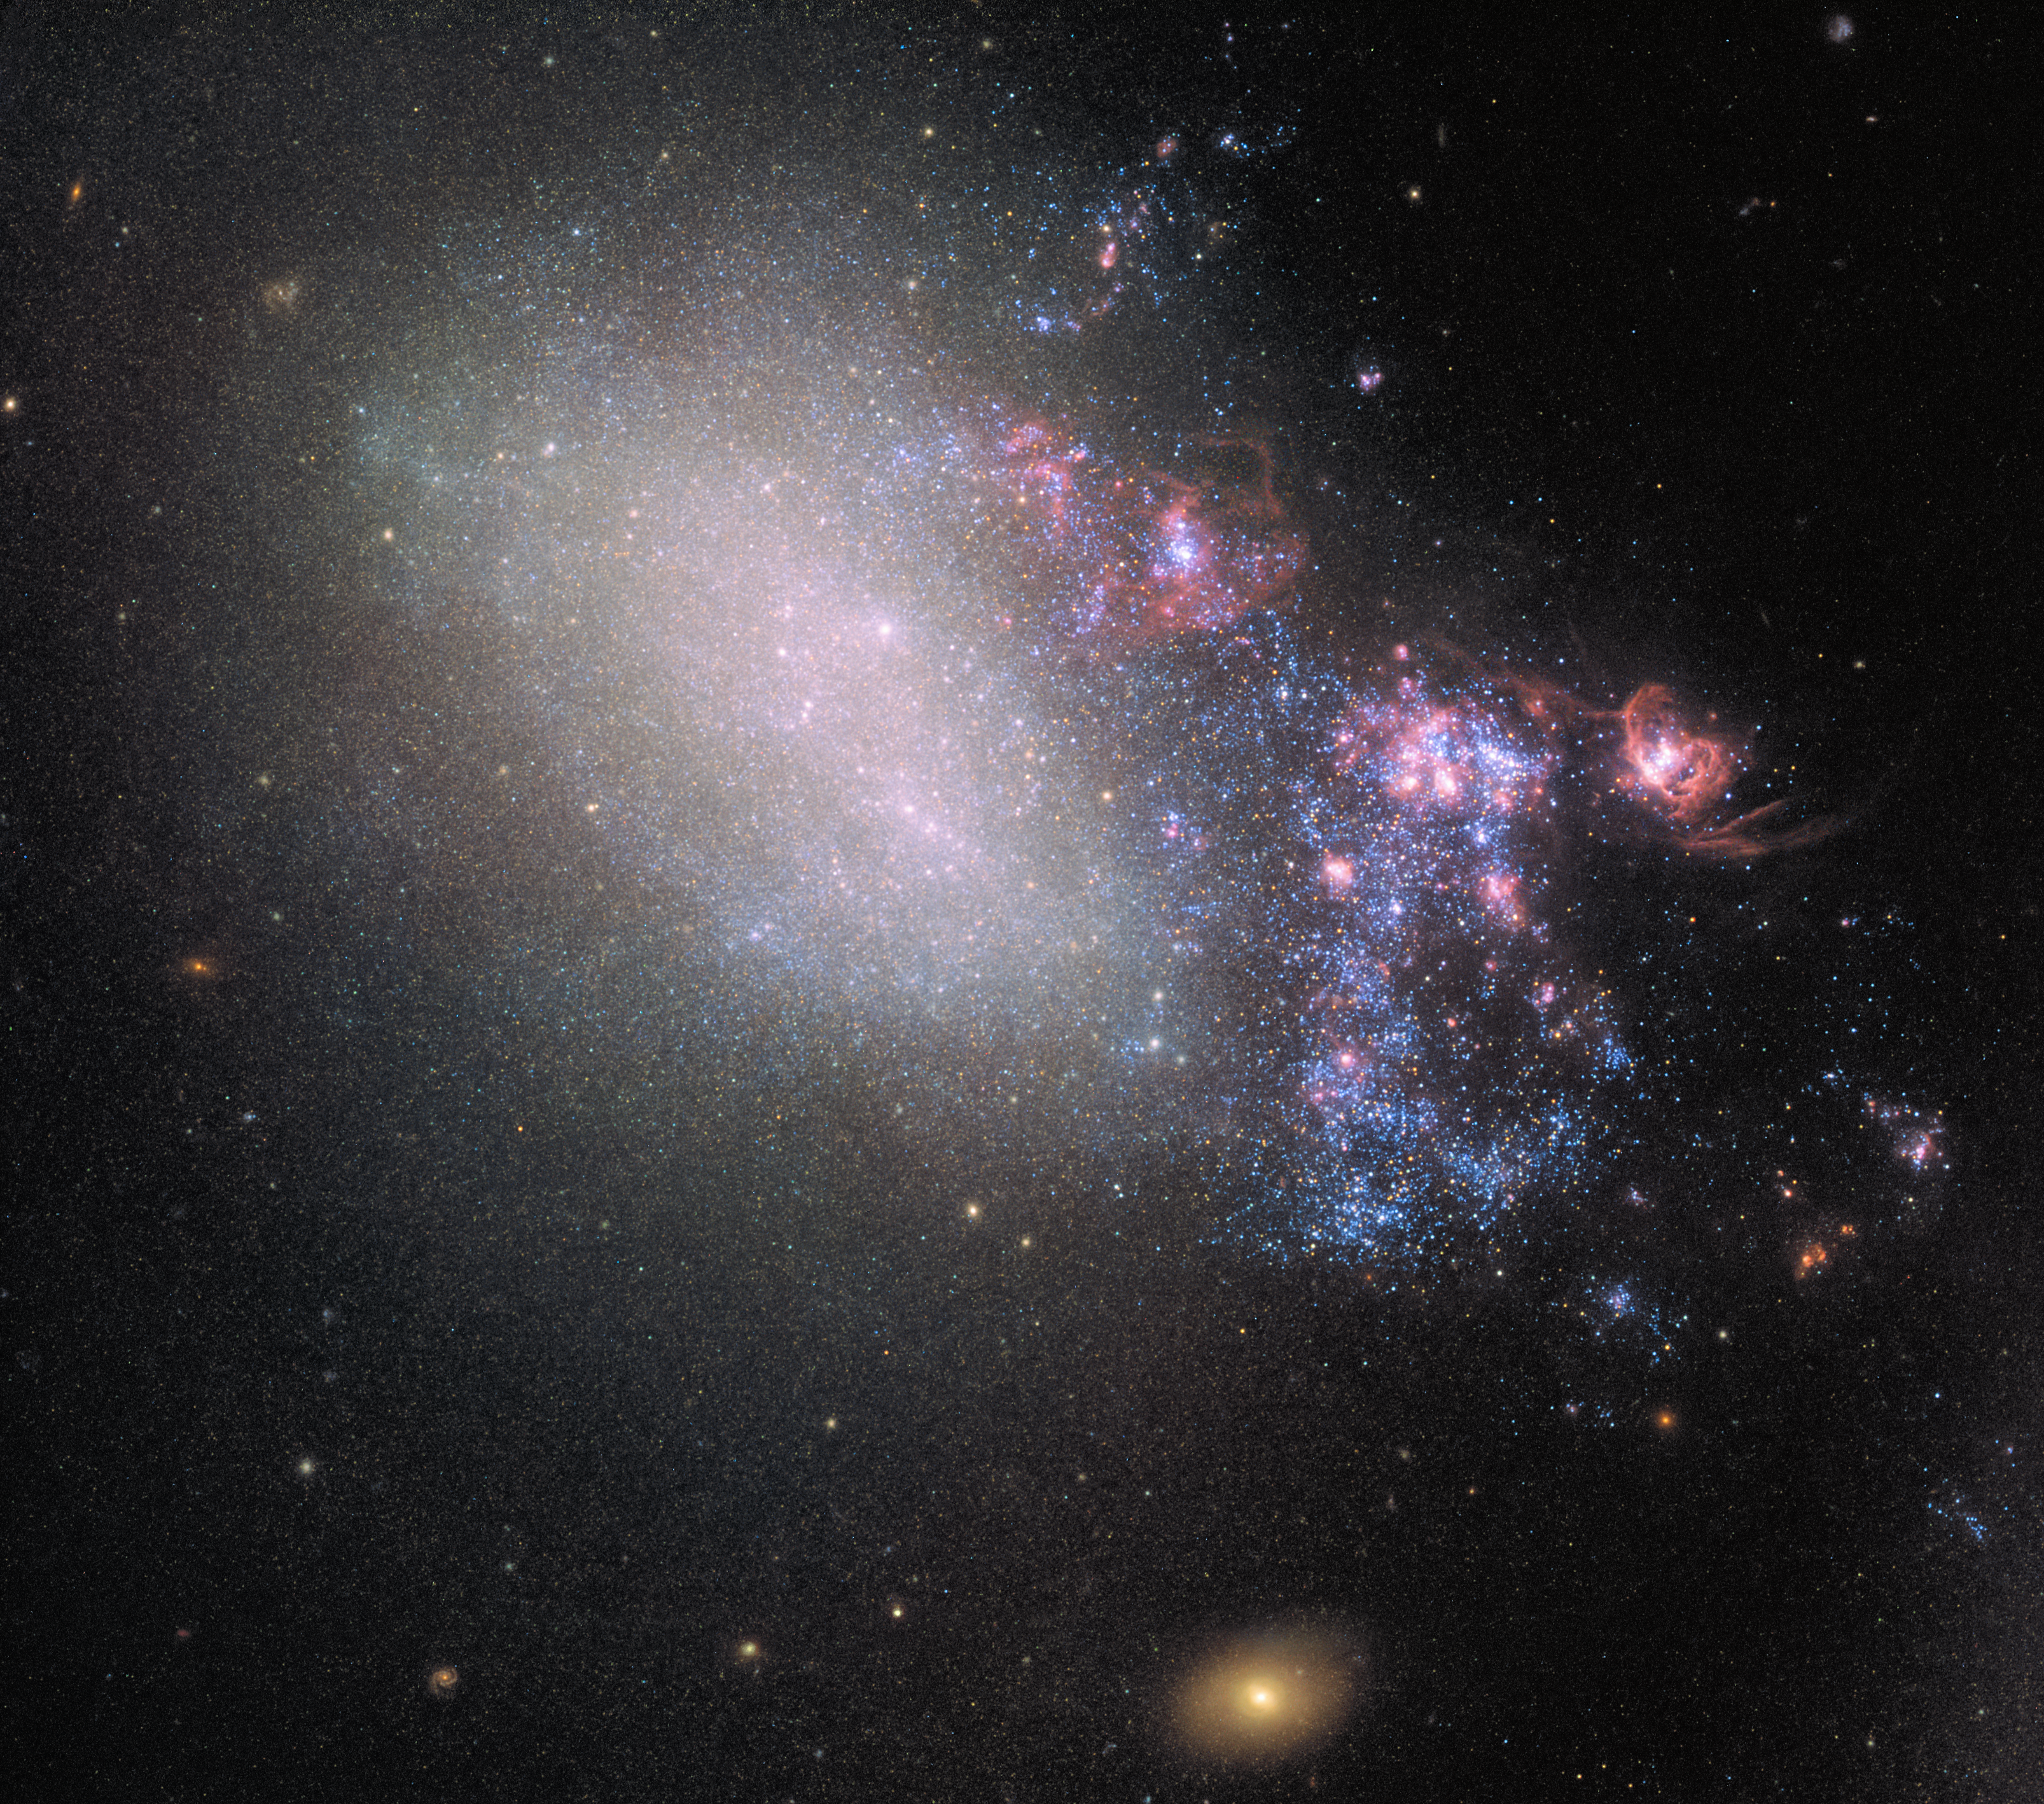

On the verge

NGC 4485 has been involved in a dramatic gravitational interplay with its larger galactic neighbour NGC 4490 — out of frame to the bottom right in this image. This ruined the original, ordered spiral structure of the galaxy and transformed it into an irregular one.

The interaction also created a stream of material about 25 000 light-years long, connecting the two galaxies. The stream, visible to the right of the galaxy is made up of bright knots and huge pockets of gassy regions, as well as enormous regions of star formation in which young, massive, blue stars are born.

Below NGC 4485 one can see a bright, orange background galaxy: CXOU J123033.6+414057. This galaxy is the source of X-ray radiation studied by the Chandra X-ray Observatory. It’s distance from Earth is about 850 million light-years.

Credit: ESA/Hubble, NASA
Acknowledgement: T. Roberts (Durham University), D. Calzetti (University of Massachusetts) and the LEGUS Team, R. Tully (University of Hawaii) and R. Chandar (University of Toledo).